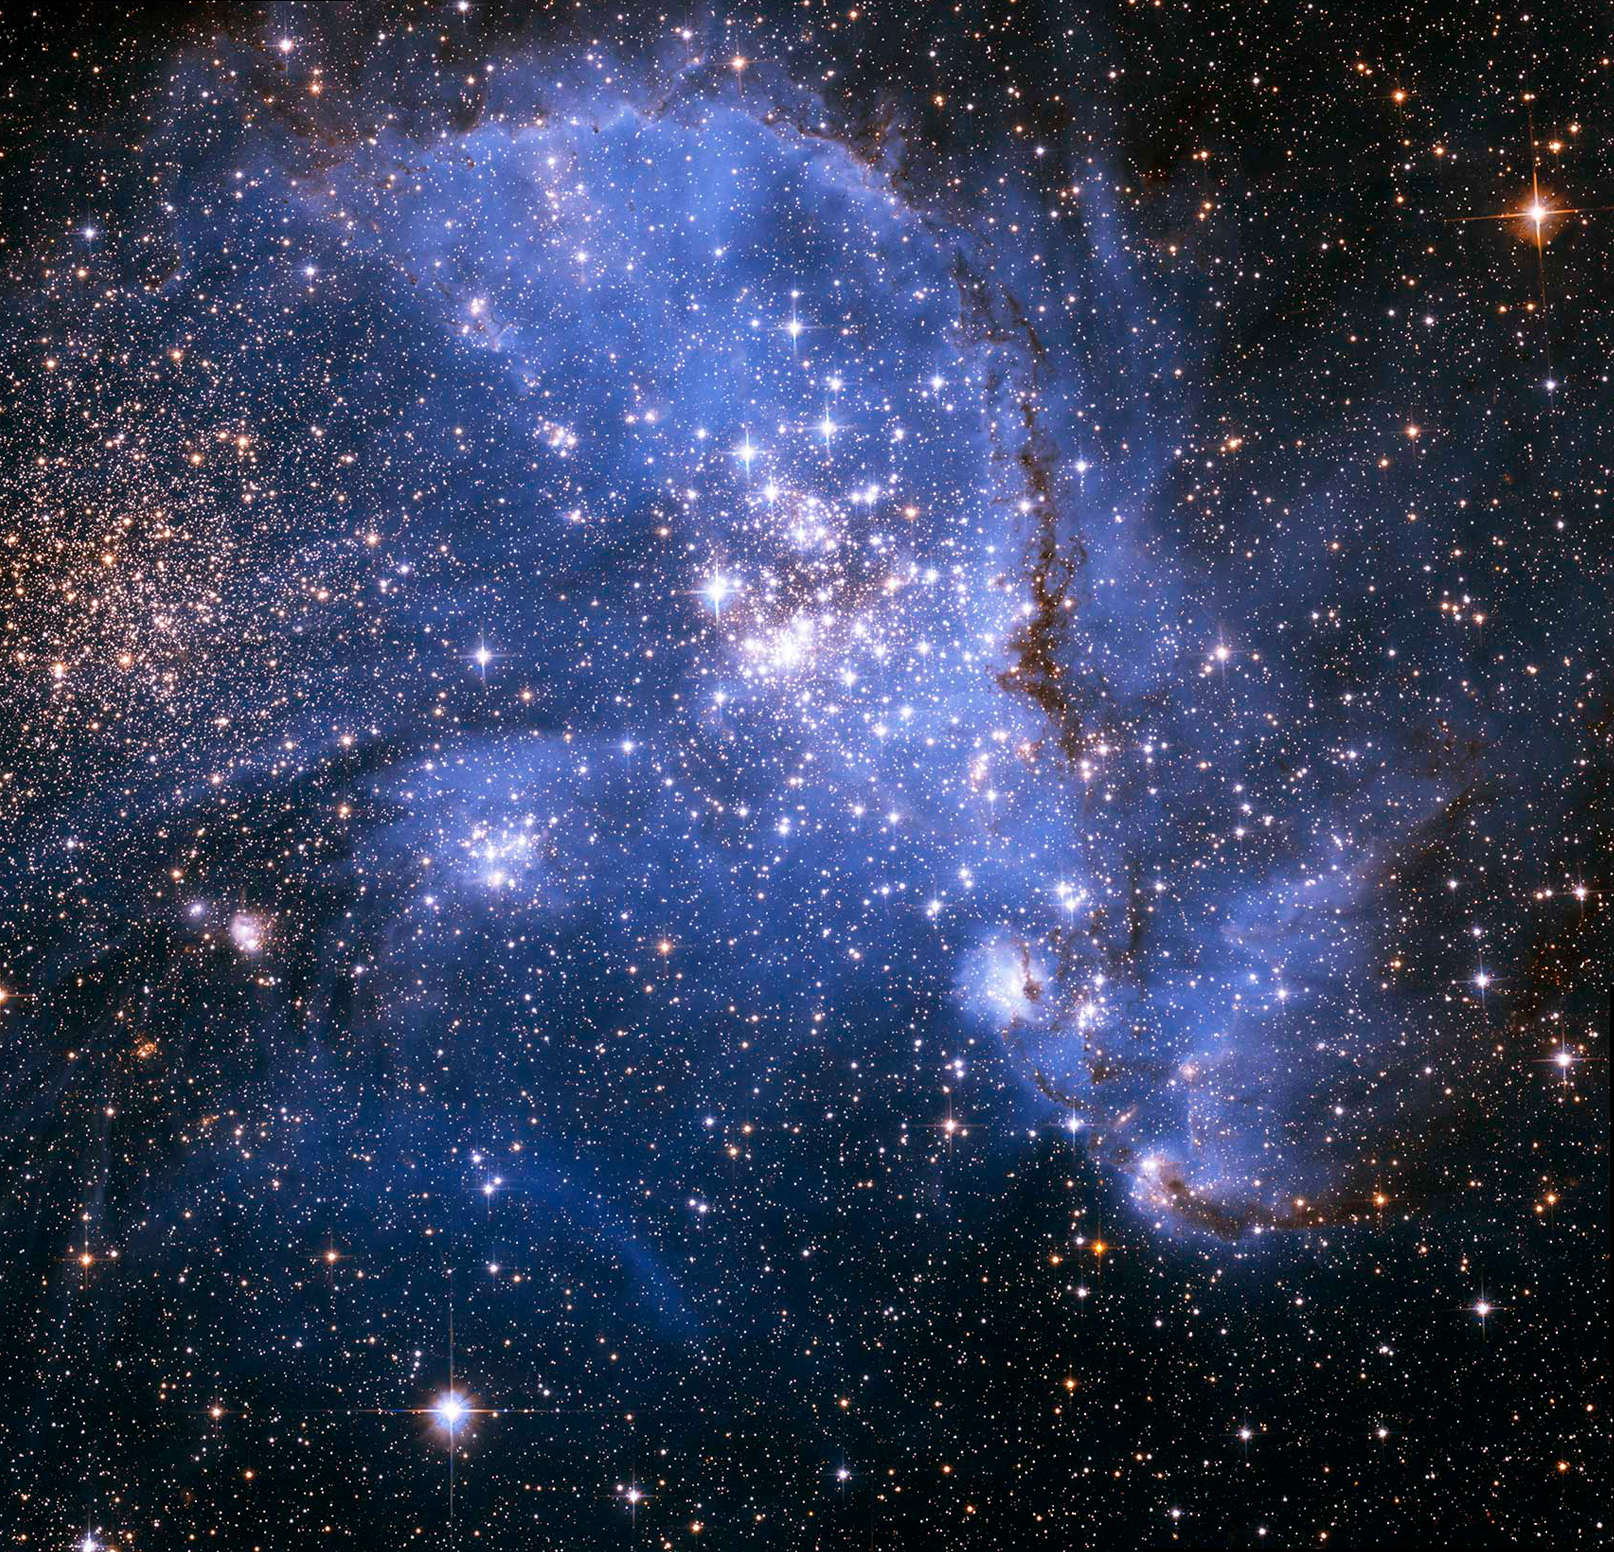

NGC 346

Astronomers have been bemused to find young stars spiralling into the centre of a massive cluster of stars in the Small Magellanic Cloud, a satellite galaxy of the Milky Way. The outer arm of the spiral in this huge, oddly shaped stellar nursery — called NGC 346 — may be feeding star formation in a river-like motion of gas and stars. This is an efficient way to fuel star birth, researchers say.

Credit: NASA, ESA, A. James (STScI)